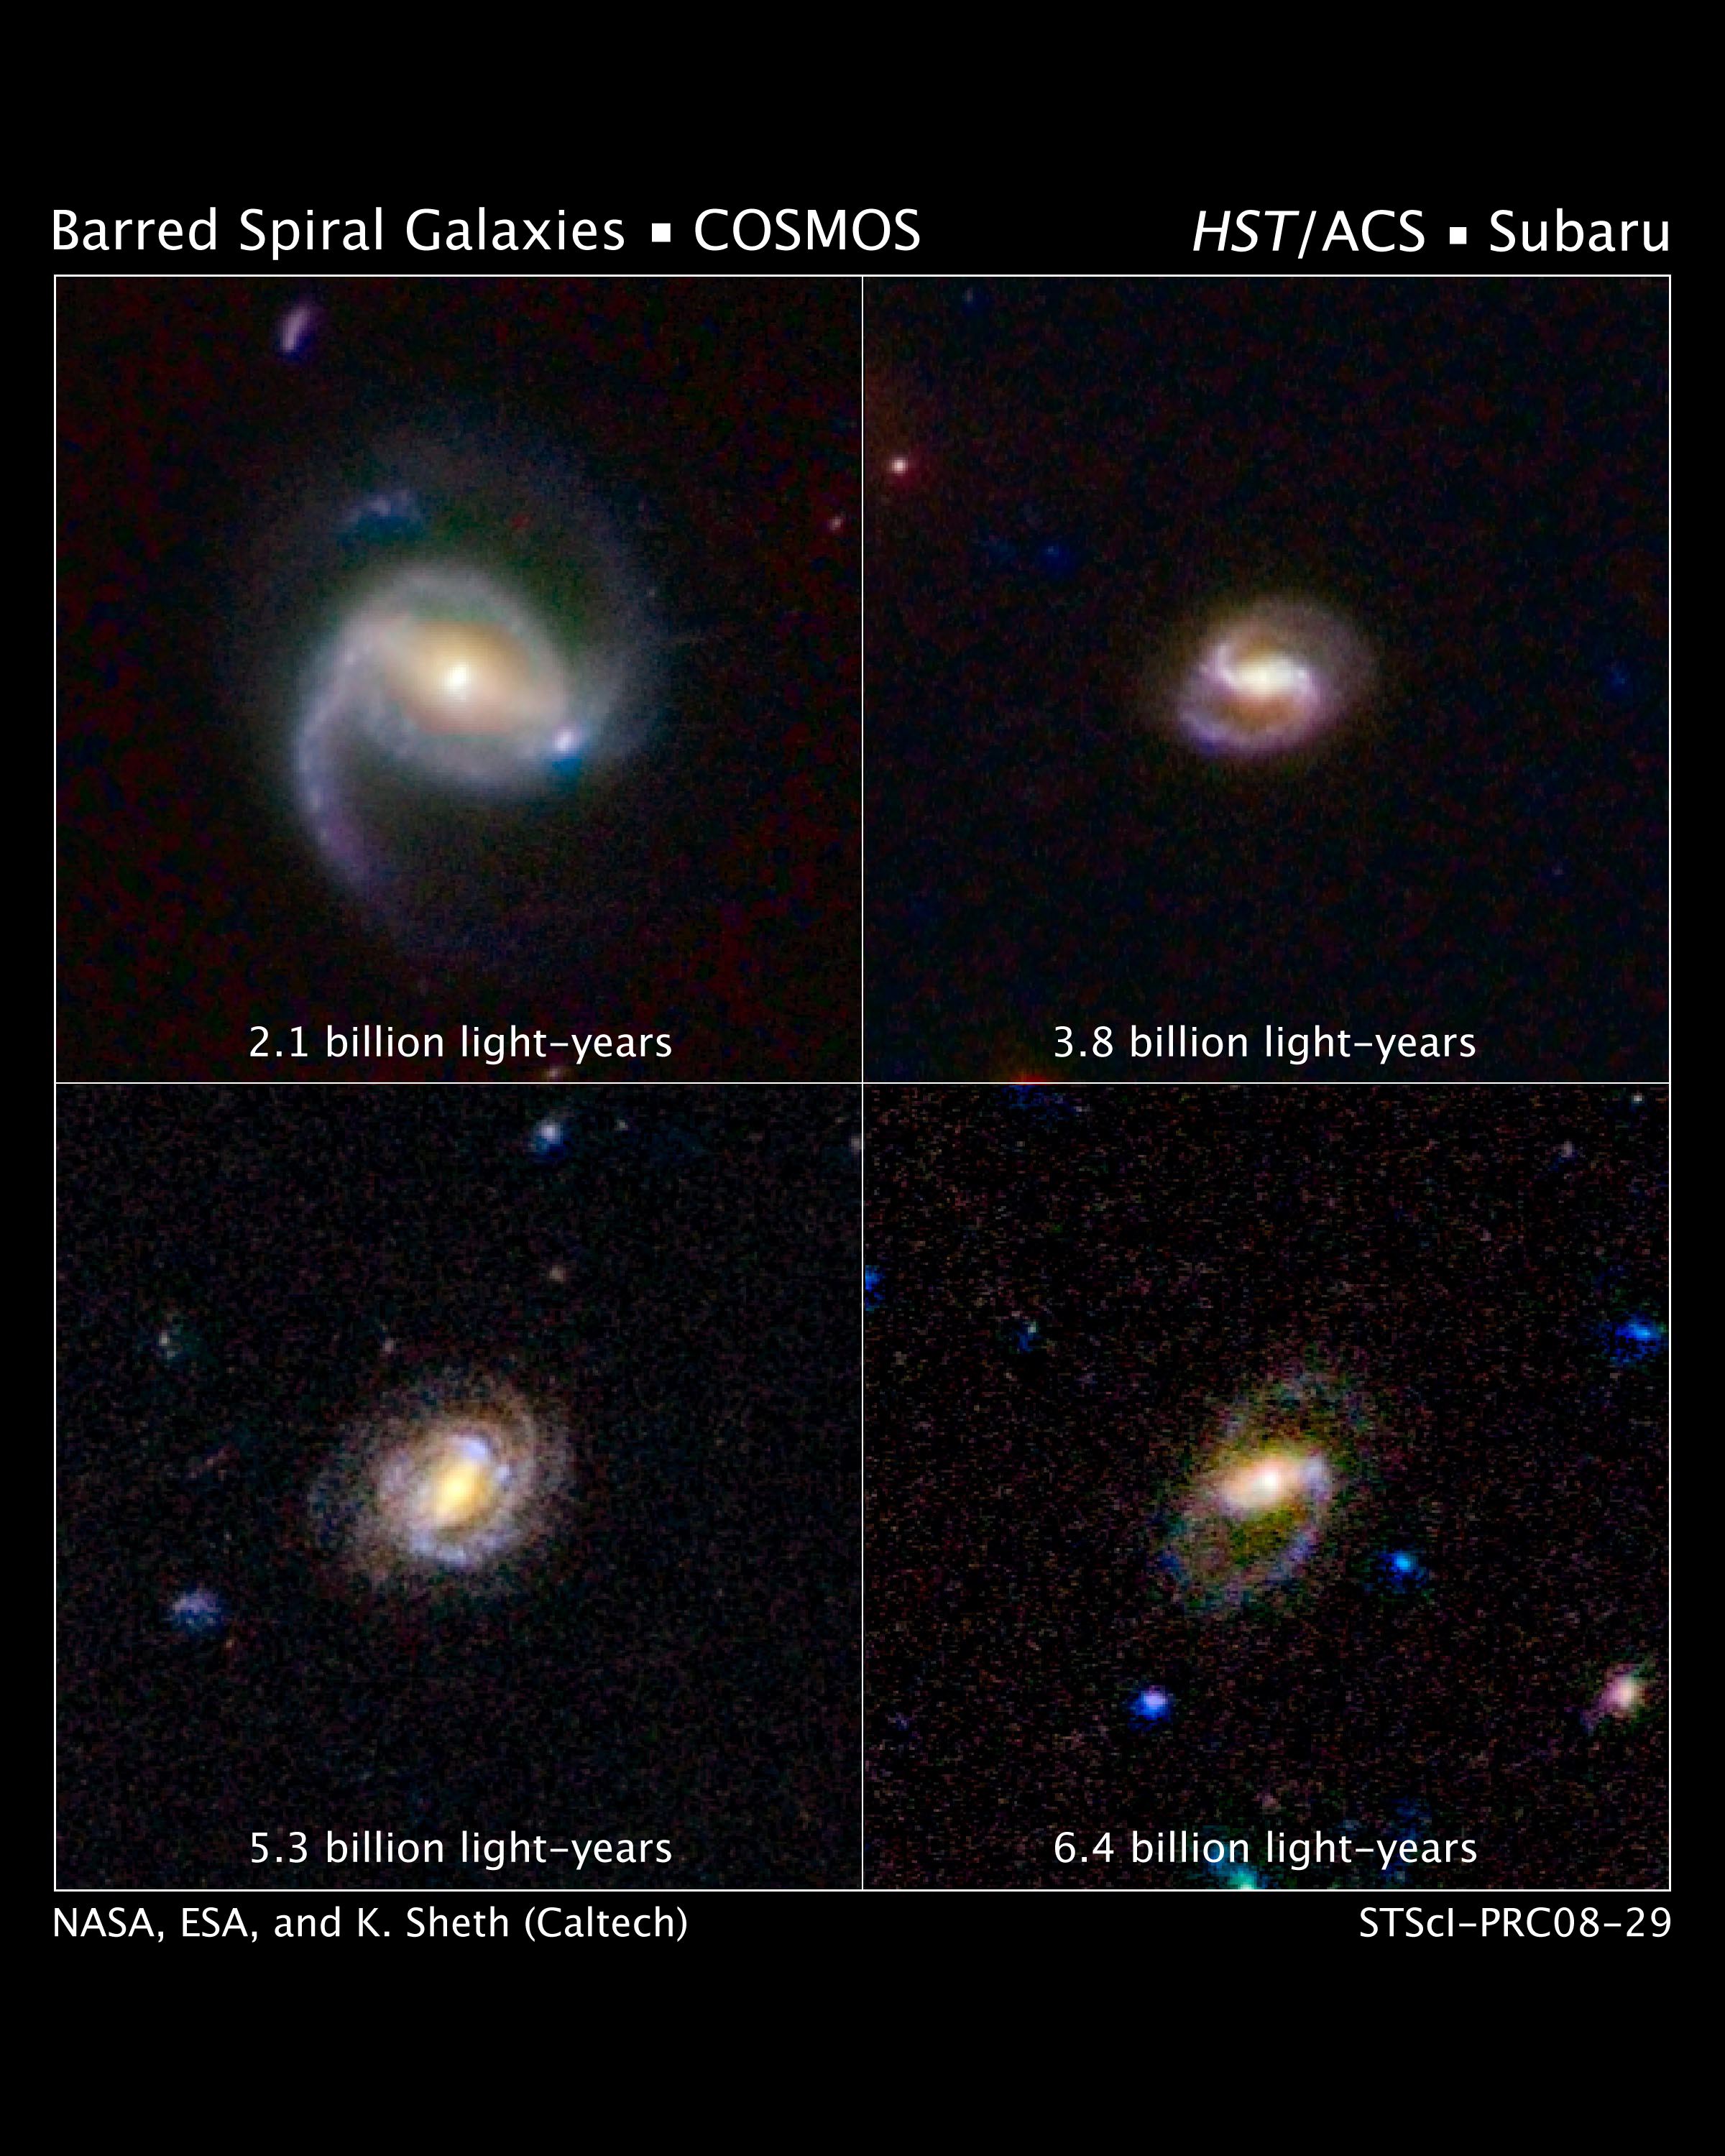

Hubble Surveys Barred Spiral Galaxies

These images show four spiral galaxies with bars of stars and gas slicing through them.

The galaxies are at various distances from Earth. The galaxy at upper left is 2.1 billion light-years away; the galaxy at upper right, 3.8 billion light-years away; the galaxy at lower left, 5.3 billion light-years away; and the galaxy at lower right, 6.4 billion light-years away.

The galaxies are part of a landmark study of more than 2,000 spiral galaxies from the largest galaxy census conducted by the Advanced Camera for Surveys aboard the NASA/ESA Hubble Space Telescope.

The survey's results show that so-called barred spiral galaxies were far less plentiful over the last 7 billion years than they are today, in the local universe. The study's results confirm the idea that bars are a sign of galaxies reaching full maturity as the "formative years" end. The observations are part of the Cosmic Evolution Survey (COSMOS).

COSMOS covers an area of sky nine times larger than the full Moon, surveying 10 times more spiral galaxies than previous observations.

Astronomers assembled these images from observations taken with Hubble and the Subaru Telescope in Mauna Kea, Hawaii.

The observations were taken between fall 2003 and spring 2005.

Credit: NASA, ESA, K. Sheth (Spitzer Science Center, California Institute of Technology, Pasadena, California), and P. Capak and N. Scoville (California Institute of Technology)